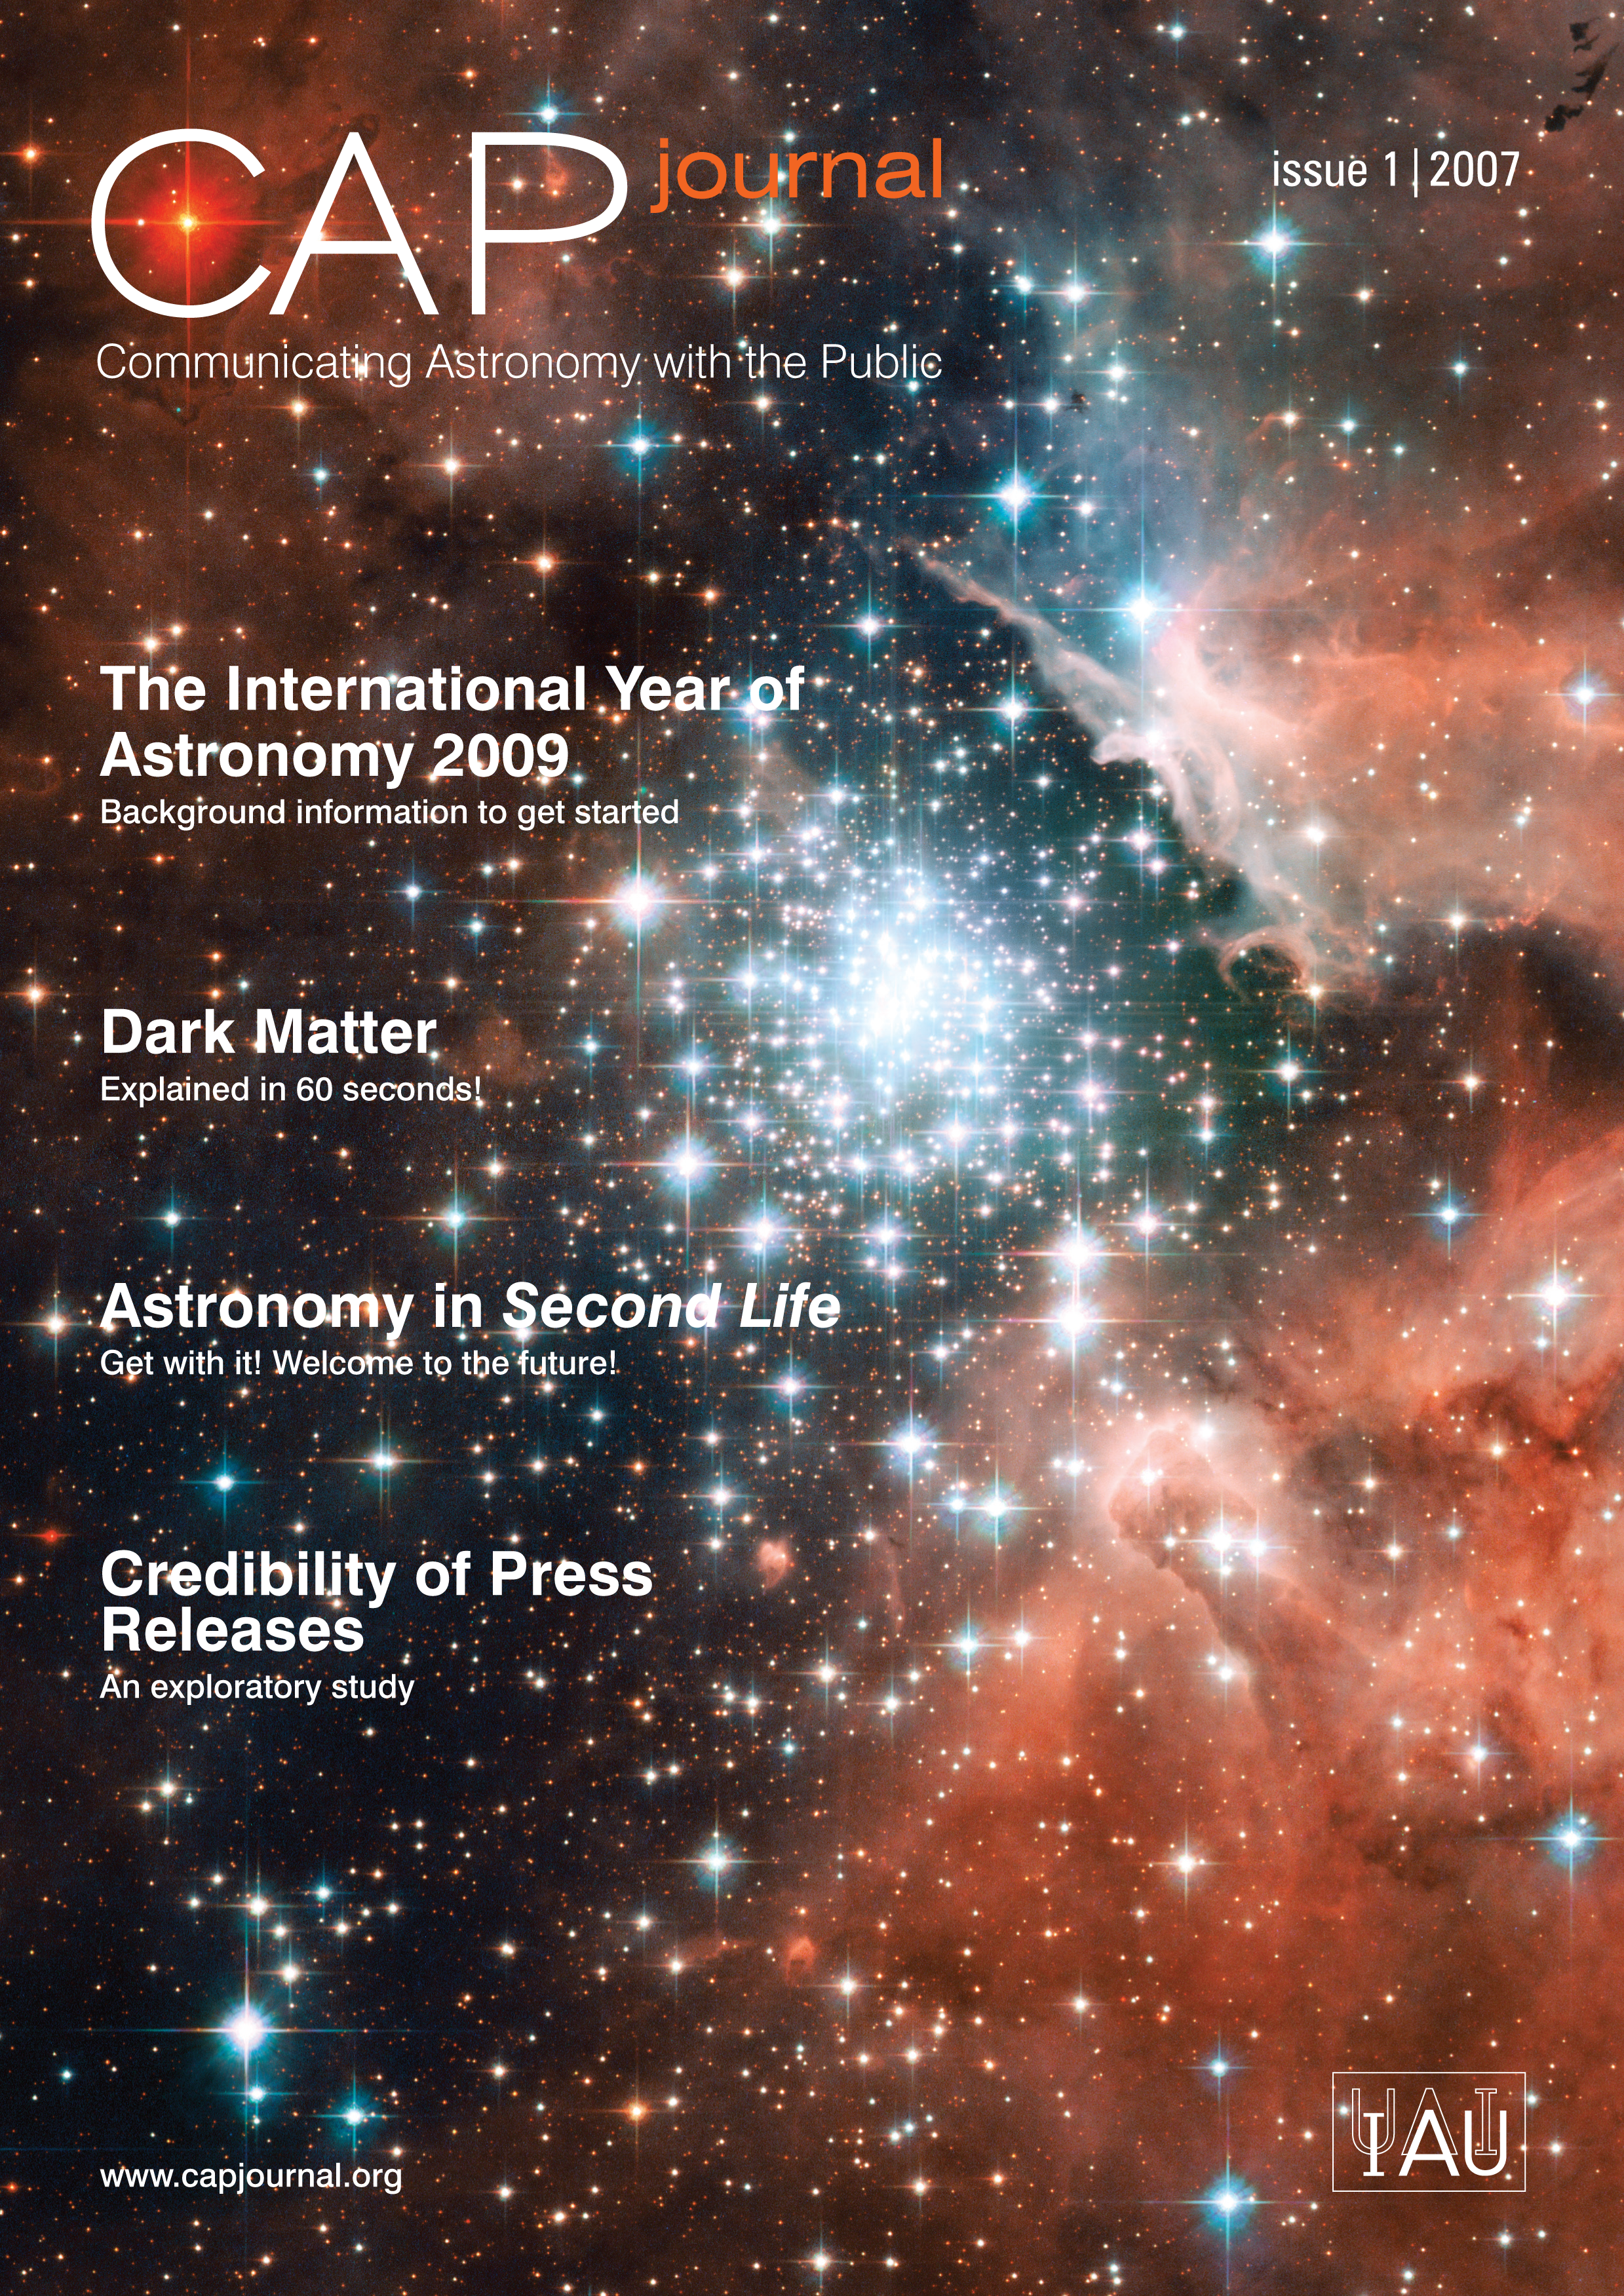

New journal for astronomy communicators goes live!

A new peer-reviewed journal released today by the IAU will provide astronomy communicators with important tools and innovative resources to communicate more effectively the workings of the Universe to the public.

IAU President Catherine Cesarsky says "We are pleased to announce the first issue of the Communicating Astronomy with the Public Journal. The IAU is strongly dedicated to improving the global level of astronomy education and outreach."

The journal provides astronomy communicators with a mix of resources, opinion and information on how to communicate more effectively to the general public the workings of the Universe. As Pedro Russo, Editor-In-Chief of the journal, explains, the CAP journal has an important aim: "As the astronomy education and public outreach community expands globally, it becomes increasingly important to establish a community of science communication experts."

President of IAU Commission 55 Communicating Astronomy with the Public, Ian Robson: "Astronomy has an innate appeal to people of all ages, partly because it concerns the fascinating great questions 'of life, the Universe and everything' and partly because many of the data obtained with telescopes can be presented as objects of stunning beauty. Astronomy is a great example of how fascinating physics can be."

"Science communicators are encouraged to submit their own articles for publication", explains Russo. "Public communication of astronomy is a burgeoning field of science communication. We would like to see the astronomy outreach community deeply involved in this journal's evolution and production."

The journal will be published quarterly for free in print and online. It will act as a repository of ideas for astronomy communicators; for example in use with activities as part of the International Year of Astronomy 2009 which will be a global celebration of astronomy and its contributions to society and culture. Pedro Russo, also IAU Coordinator for the International Year of Astronomy 2009, explains "The next few years will be extremely important for astronomy communication and education. The International Year of Astronomy 2009 will serve as a unique platform to inform the public about the latest discoveries in astronomy."

The first two issues are sponsored by the European Space Agency, the International Astronomical Union, Instituto de Astrofísica de Canarias (Spain) and ESO.

Free subscription forms and the online version of the journal can be found at www.capjournal.org

Credit: NASA & ESA